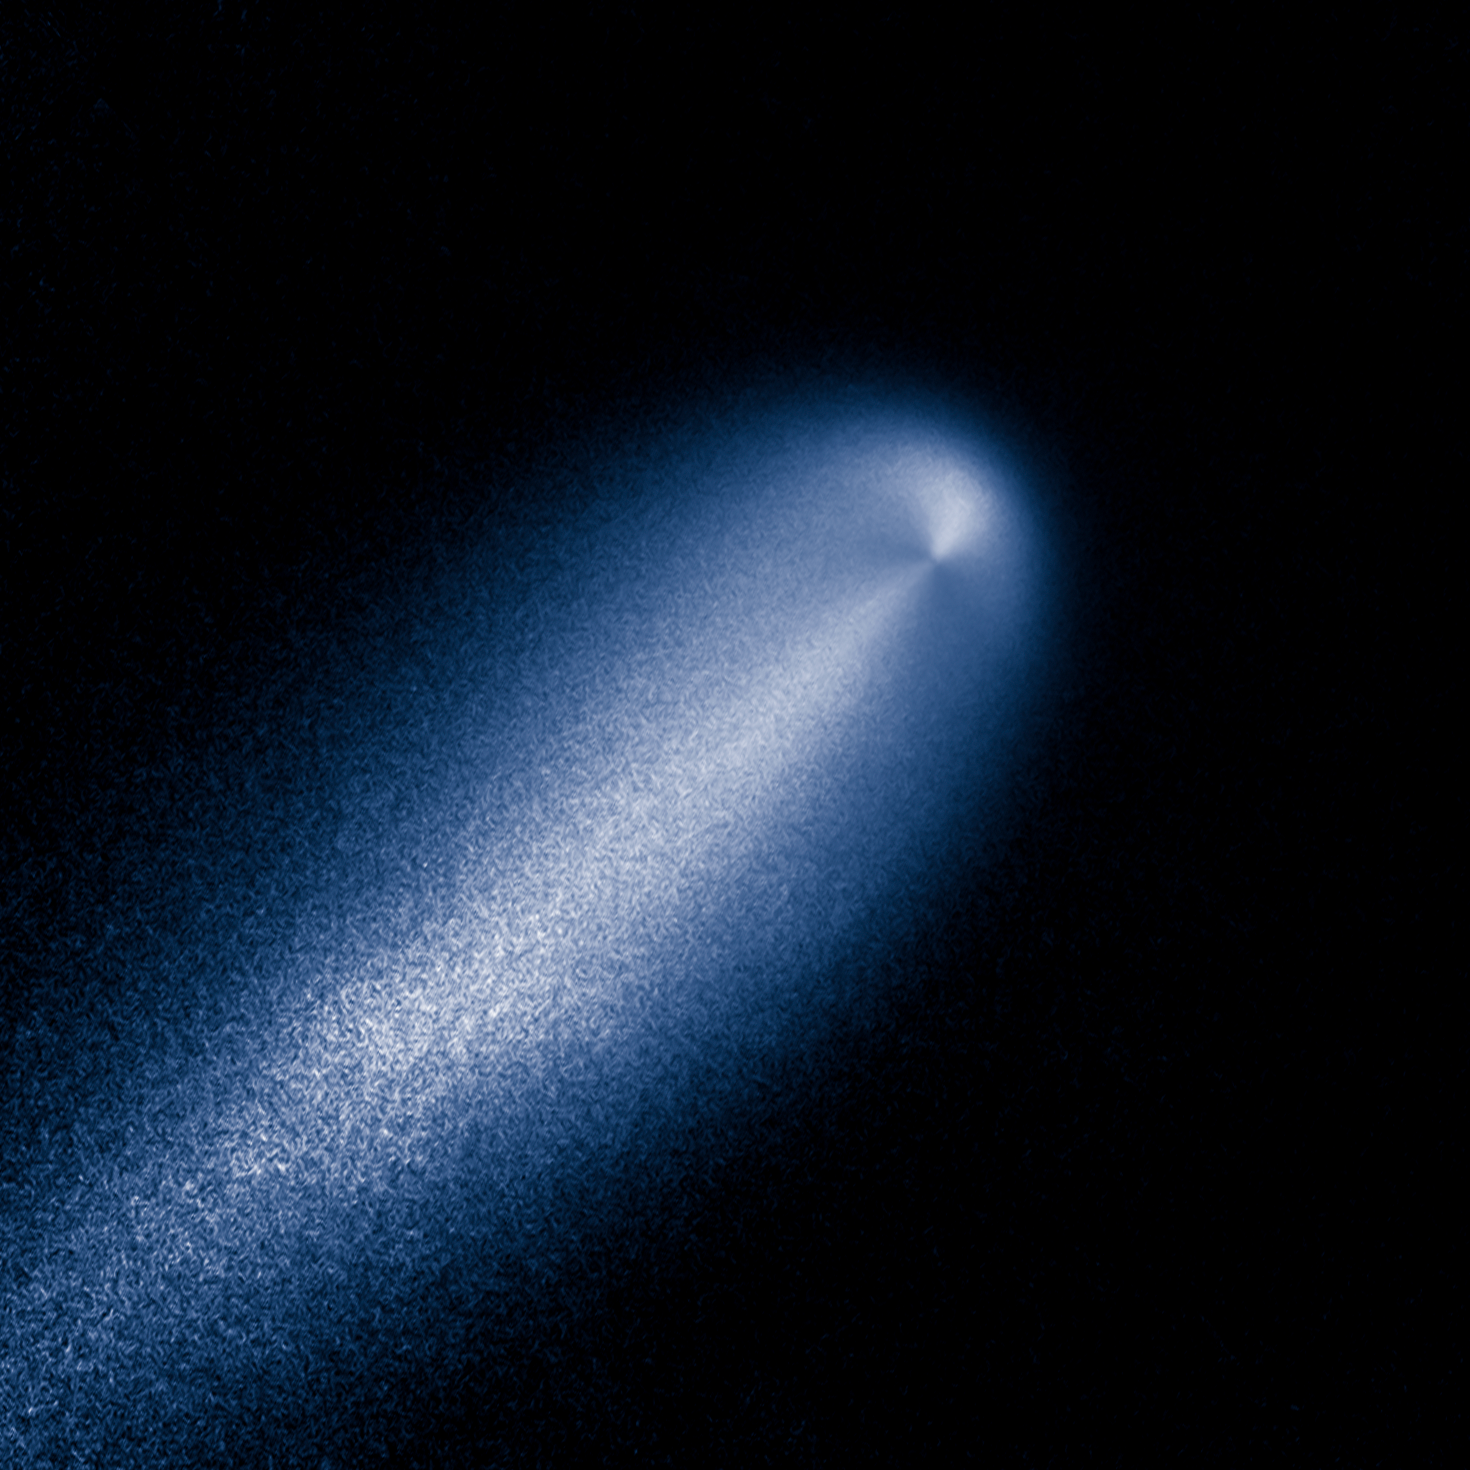

Enhanced Hubble image of Comet ISON

This is a contrast-enhanced image produced from Hubble images of Comet C/2012 S1 (ISON). It reveals the subtle structure in the inner coma of the comet. In this computer-processed view, the Hubble image has been divided by a computer model coma that decreases in brightness proportional to the distance from the nucleus, as expected for a comet that is producing dust uniformly over its surface. ISON's coma shows enhanced dust particle release on the sunward-facing side of the comet's nucleus, the small, solid body at the core of the comet. This information is invaluable for determining the comet's shape and evolution, and the spin of the solid nucleus.

Credit: NASA, ESA, J.-Y. Li (Planetary Science Institute), and the Hubble Comet ISON Science Team